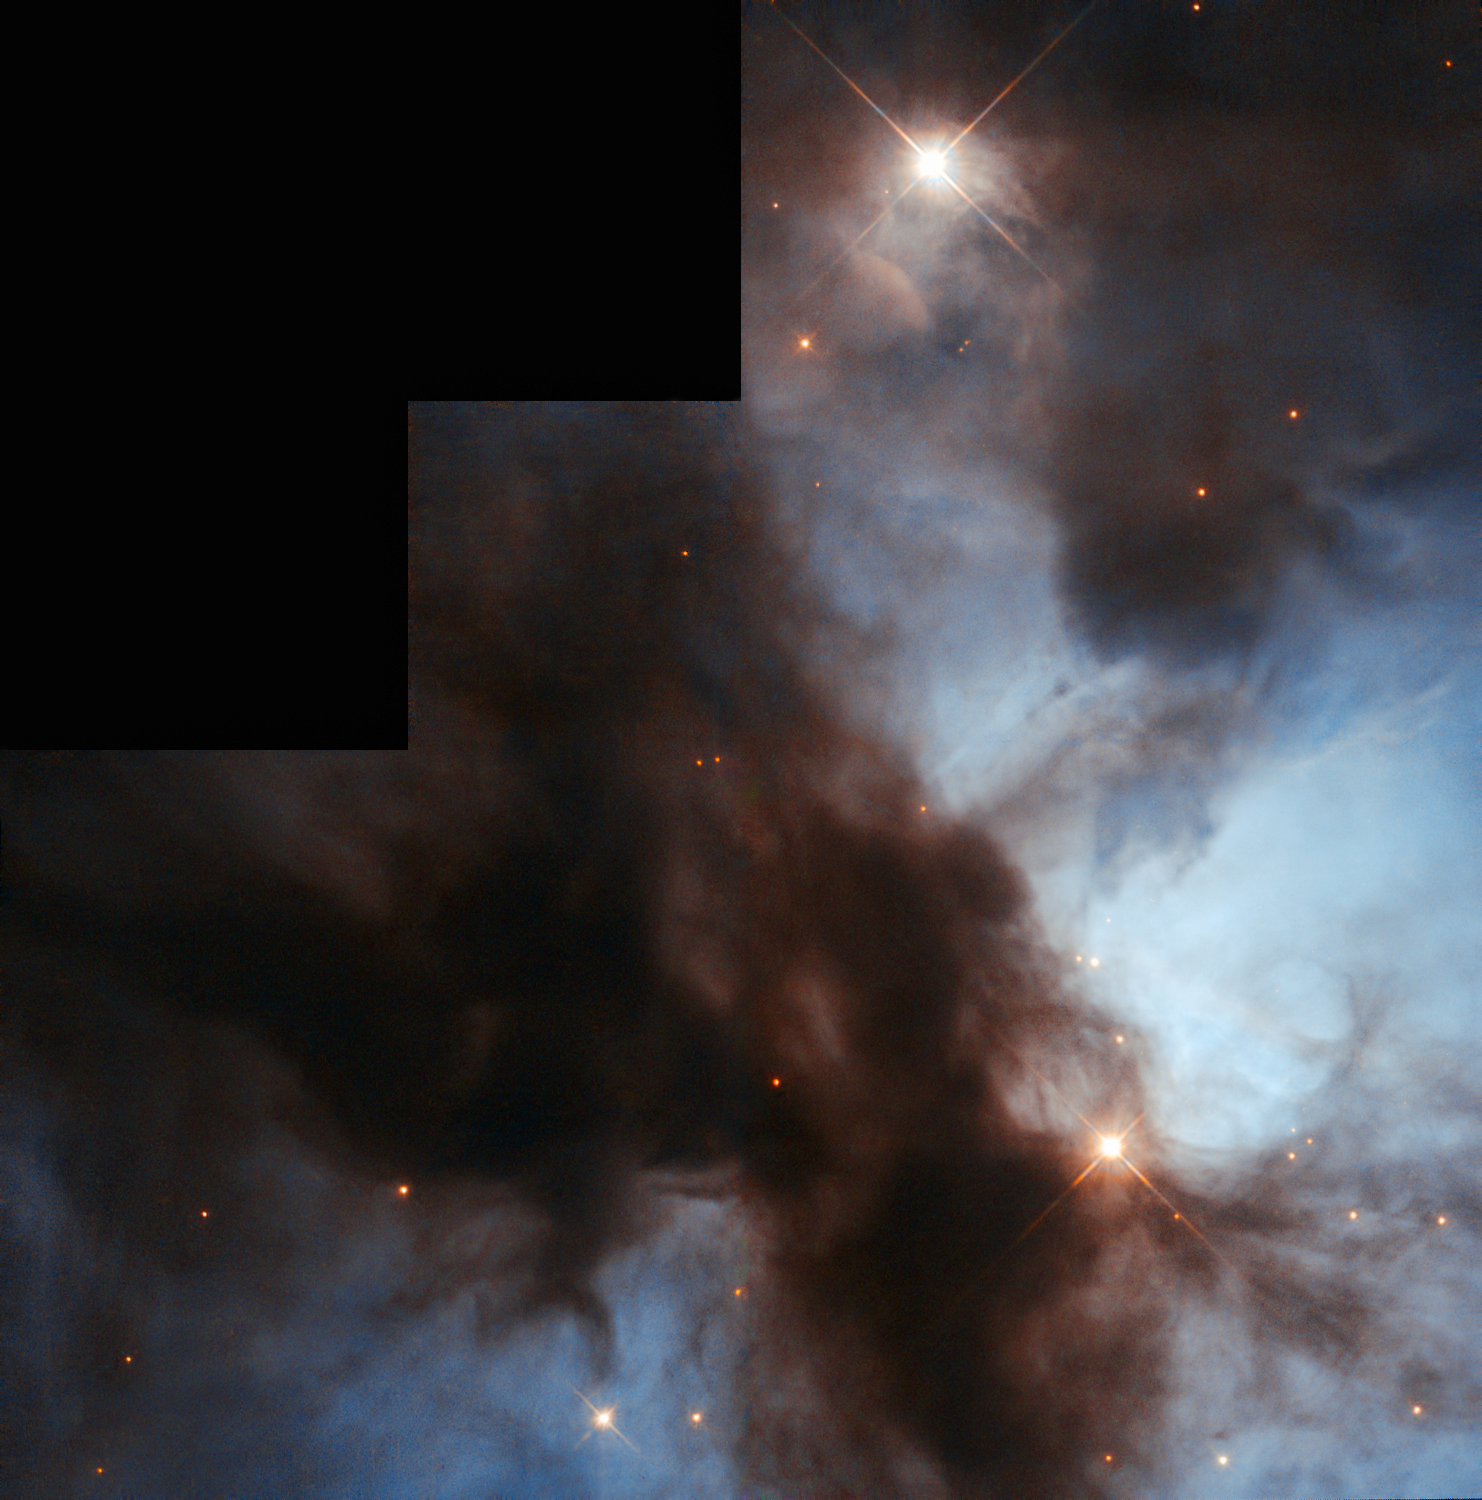

NGC 1579: The Trifid of the North

Unlike the venomous fictional plants that share its name, the Trifid of the North, otherwise known as the Northern Trifid or NGC 1579, poses no threat to your vision. The nebula’s moniker is inspired by the better-known Messier 20, the Trifid Nebula, which lies very much further south in the sky and displays strikingly similar swirling clouds of gas and dust.

The Trifid of the North is a large, dusty region that is currently forming new stars. These stars are very hot and therefore appear to be very blue. During their short lives they radiate strongly into the gas surrounding them, causing it to glow brightly. Many regions like the Trifid of the North — named H II regions — are clumpy and strangely shaped due to the powerful winds emanating from the stars within them. H II regions also have relatively short lives, furiously forming baby stars until the immense winds from these bodies blow the gas and dust away, leaving just stars behind.

The image above, captured by the NASA/ESA Hubble Space Telescope, shows the bright body of the nebula, with dark dust lanes snaking across the frame. The Trifid of the North glows strongly due to the many stars within it, like young binary EM* LkHA 101. Visible to the bottom right of the image, this binary is thought to be surrounded by a hundred or so fainter and less massive stars, making up a recently formed cluster. It lies behind a cloud of dust so thick that it is almost invisible to astronomers at optical wavelengths. Infrared imaging has now penetrated this dusty veil and is uncovering the secrets of this binary star, which is about five thousand times brighter than our own Sun.

A version of this image by Bruno Conti was entered into the Hubble’s Hidden Treasures competition.

Credit: ESA/Hubble & NASA Acknowledgement: Bruno Conti